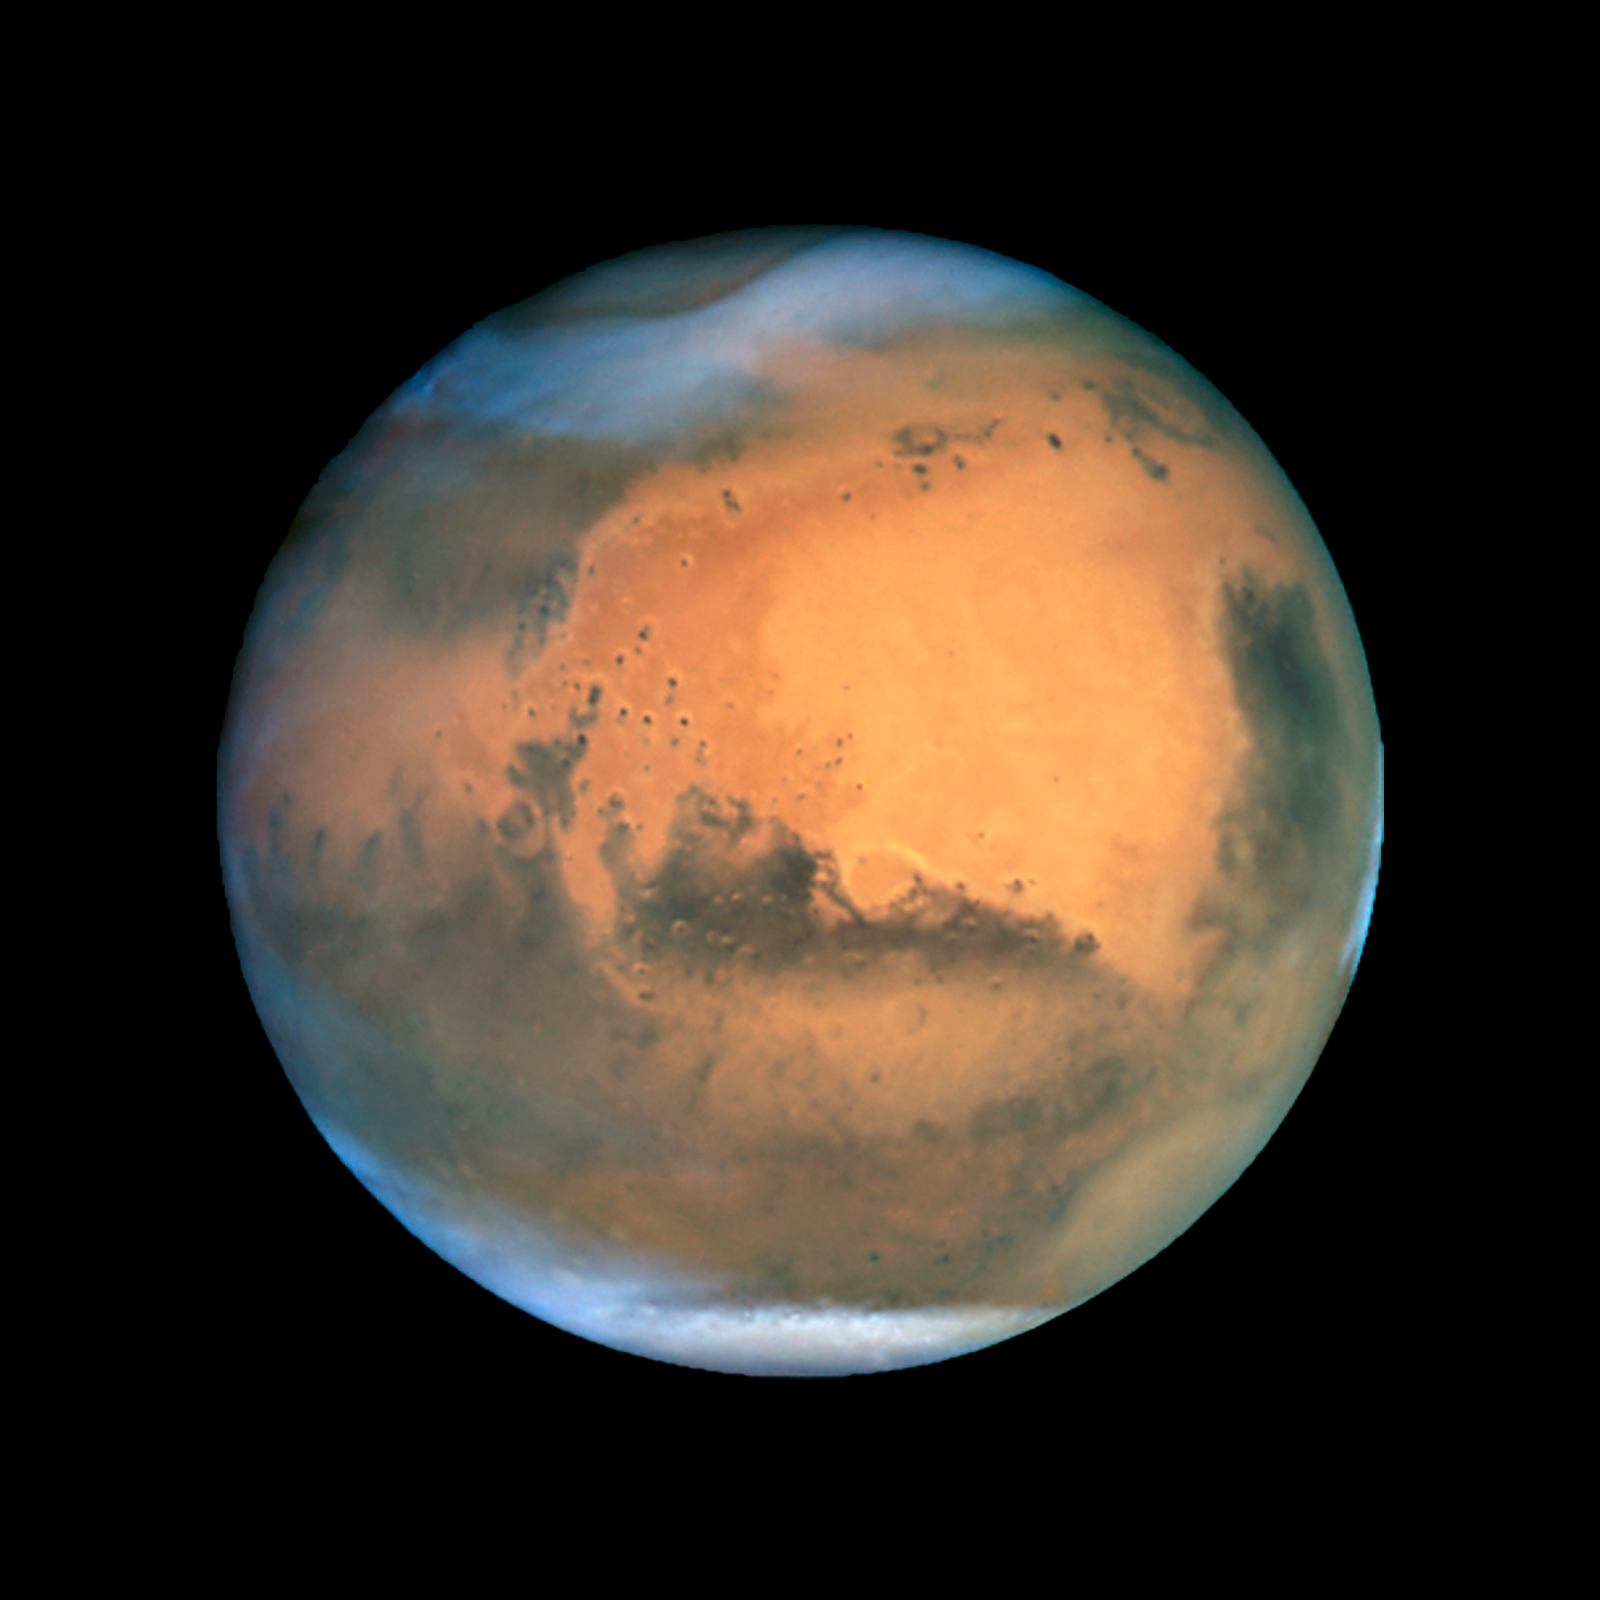

Mars near opposition 1995-2005: 2001

NASA's Hubble Space Telescope snapped this picture of Mars on October 28, within a day of its closest approach to Earth on the night of October 29. The large regional dust storm appears as the brighter, redder cloudy region in the middle of the planet's disk.

Credit: NASA, ESA, and The Hubble Heritage Team (STScI/AURA)